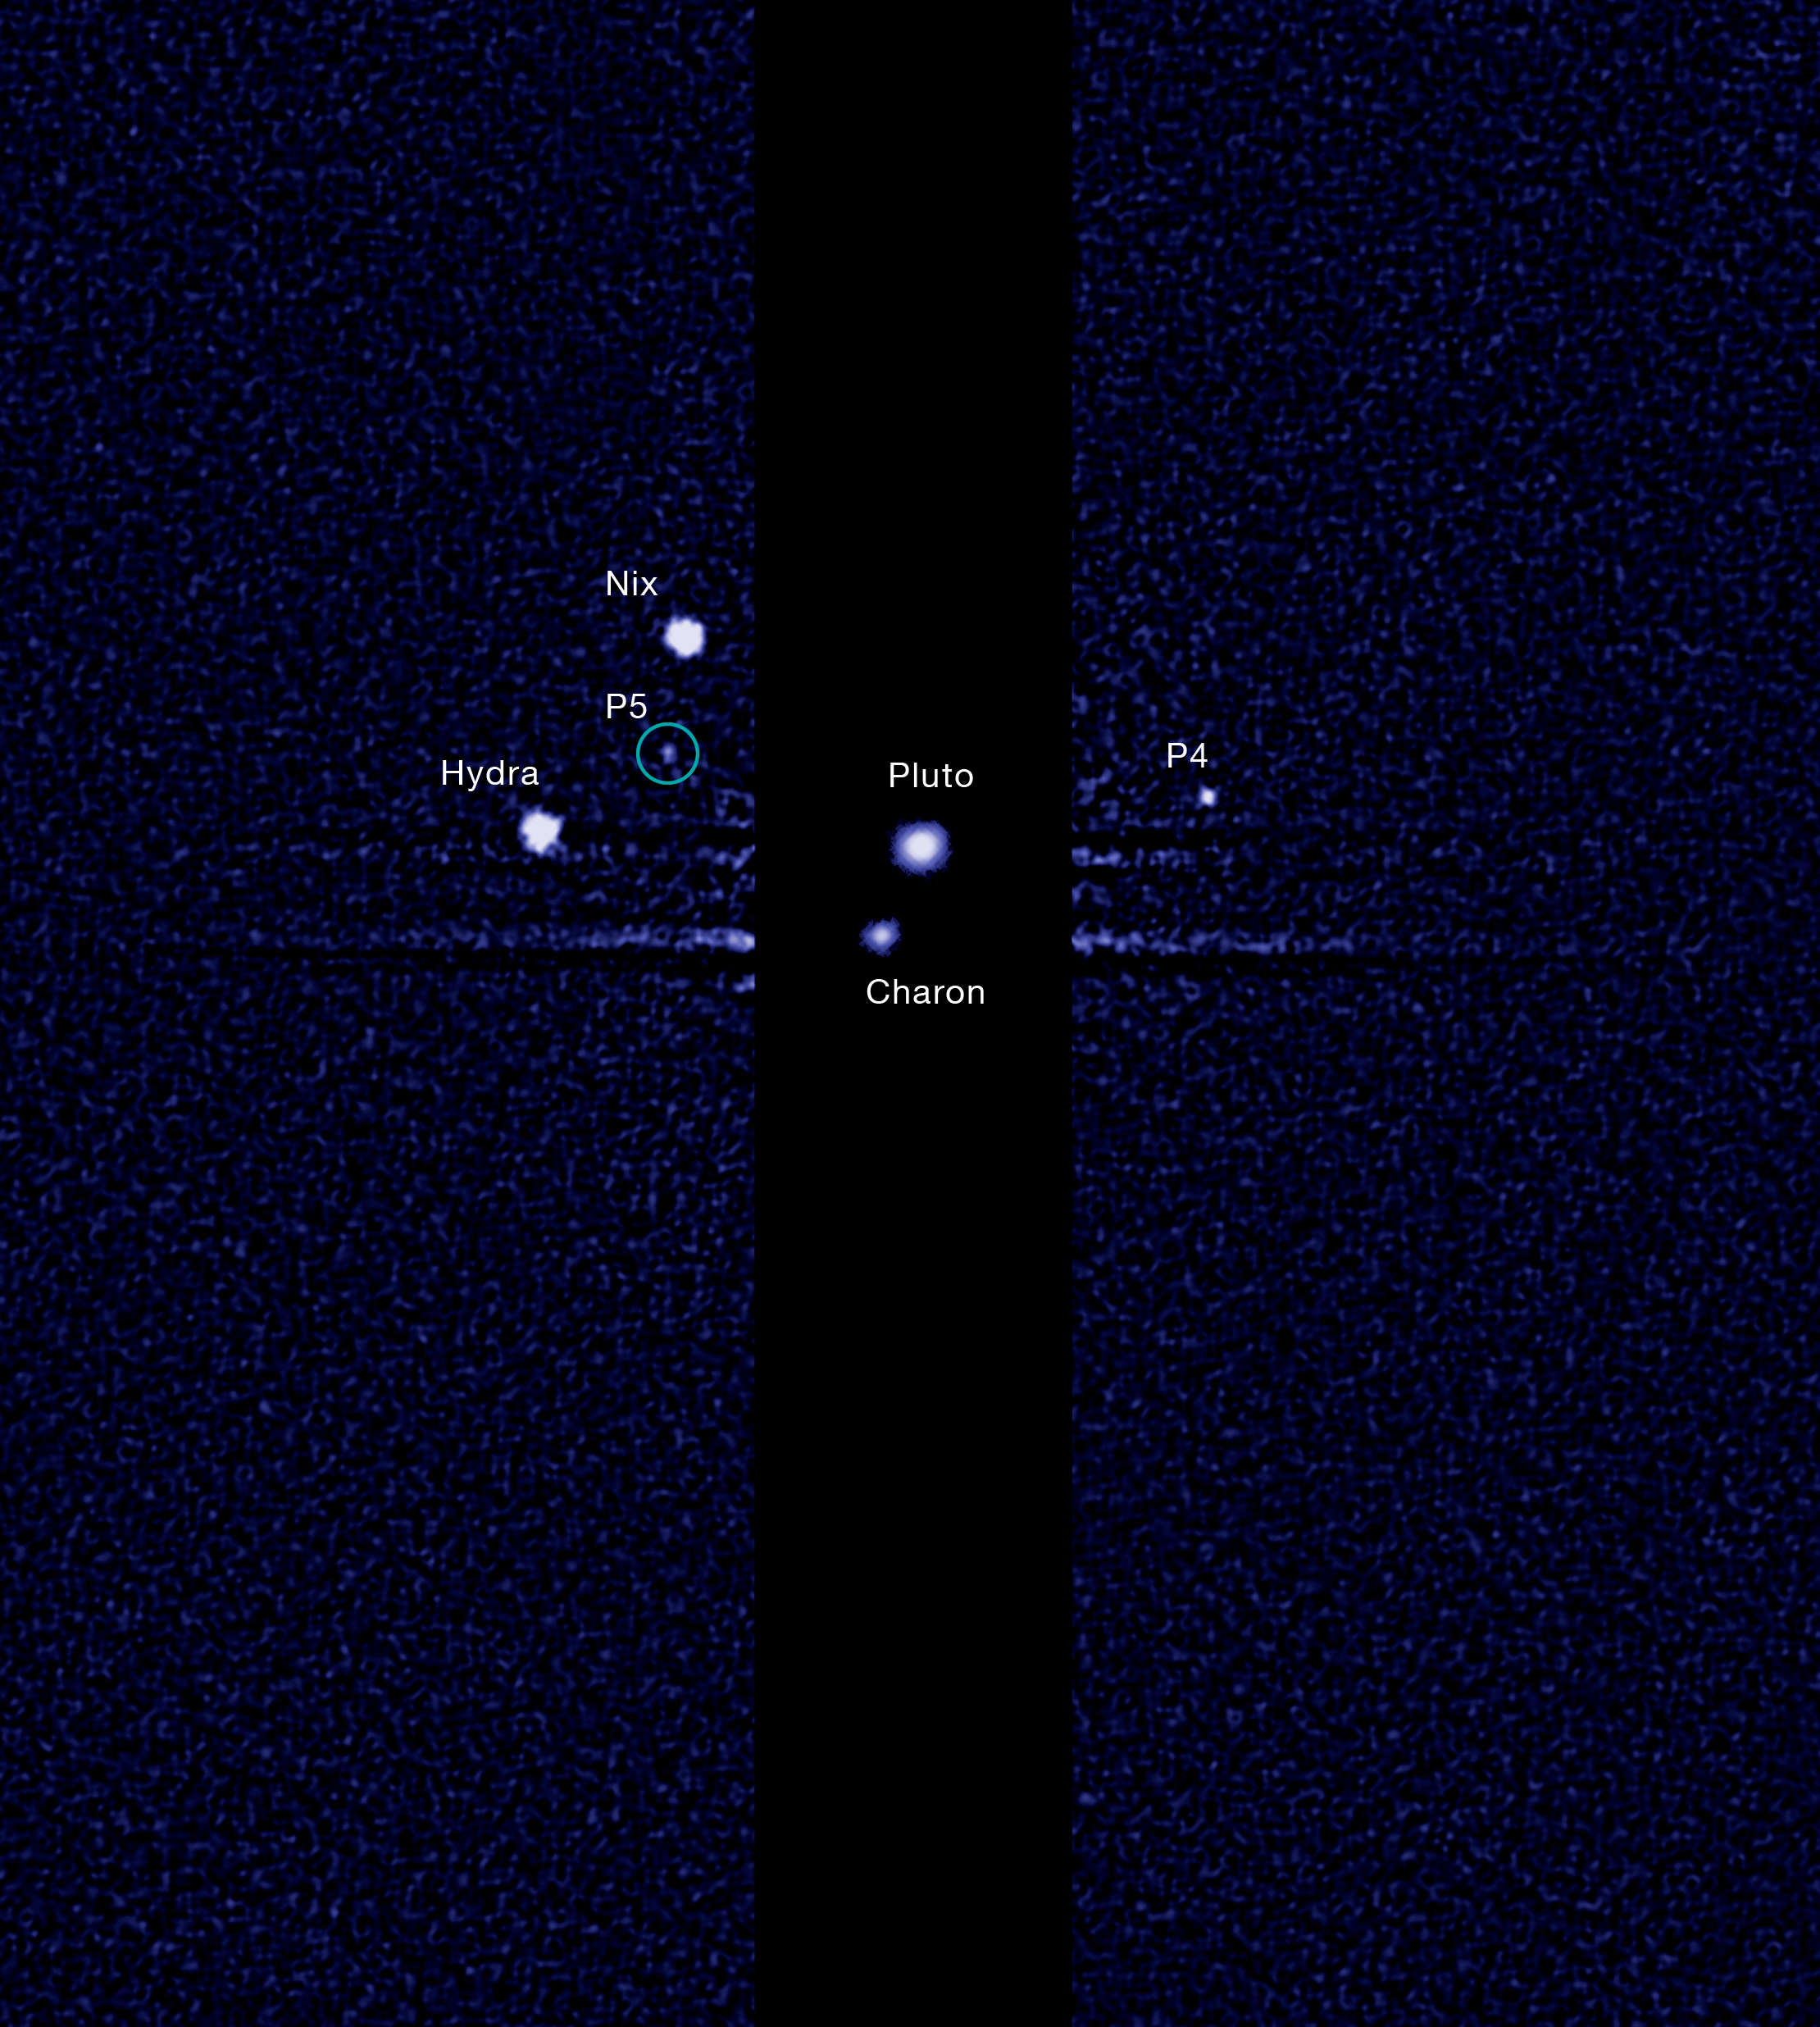

Hubble finds fifth moon orbiting Pluto (labelled)

This image, taken by the NASA/ESA Hubble Space Telescope, shows five moons orbiting the distant, icy dwarf planet Pluto.

The green circle marks the newly discovered moon, designated S/2012 (134340) 1, or P5, as photographed by Hubble’s Wide Field Camera 3 on 7 July 2012.

Other observations that collectively show the moon’s orbital motion were taken on 26, 27 and 29 June and on July 9.

The moon is estimated to be 10 to 25 kilometres across. It is in a 95 000 kilometre diameter circular orbit around Pluto that is assumed to be aligned in the same plane as the other satellites in the system.

The darker stripe in the centre of the image is because the picture is constructed from a long exposure designed to capture the comparatively faint satellites of Nix, Hydra, P4 and S/2012 (134340) 1, and a shorter exposure to capture Pluto and Charon, which are much brighter.

Credit: NASA, ESA, and M. Showalter (SETI Institute)